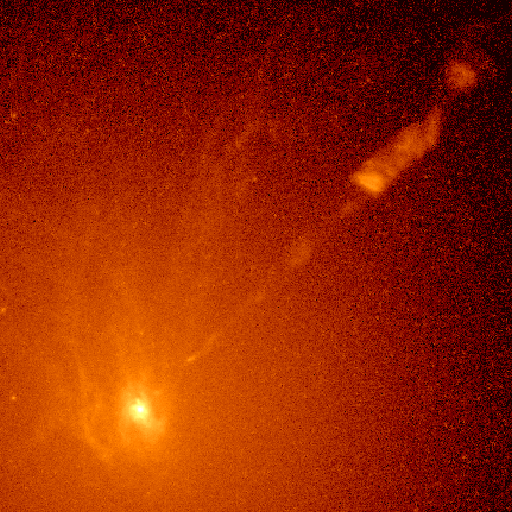

Active galaxy M87

A NASA/ESA Hubble Space Telescope image of a spiral-shaped disk of hot gas in the core of active galaxy M87. HST measurements show the disk is rotating so rapidly it contains a massive black hole at its hub.

Credit: Holland Ford, Space Telescope Science Institute/Johns Hopkins University; Richard Harms, Applied Research Corp.; Zlatan Tsvetanov, Arthur Davidsen, and Gerard Kriss at Johns Hopkins; Ralph Bohlin and GeorgeHartig at Space Telescope Science Institute; Linda Dressel and Ajay K.Kochhar at Applied Research Corp. in Landover, Md.; and Bruce Margon fromthe University of Washington in Seattle NASA/ESA